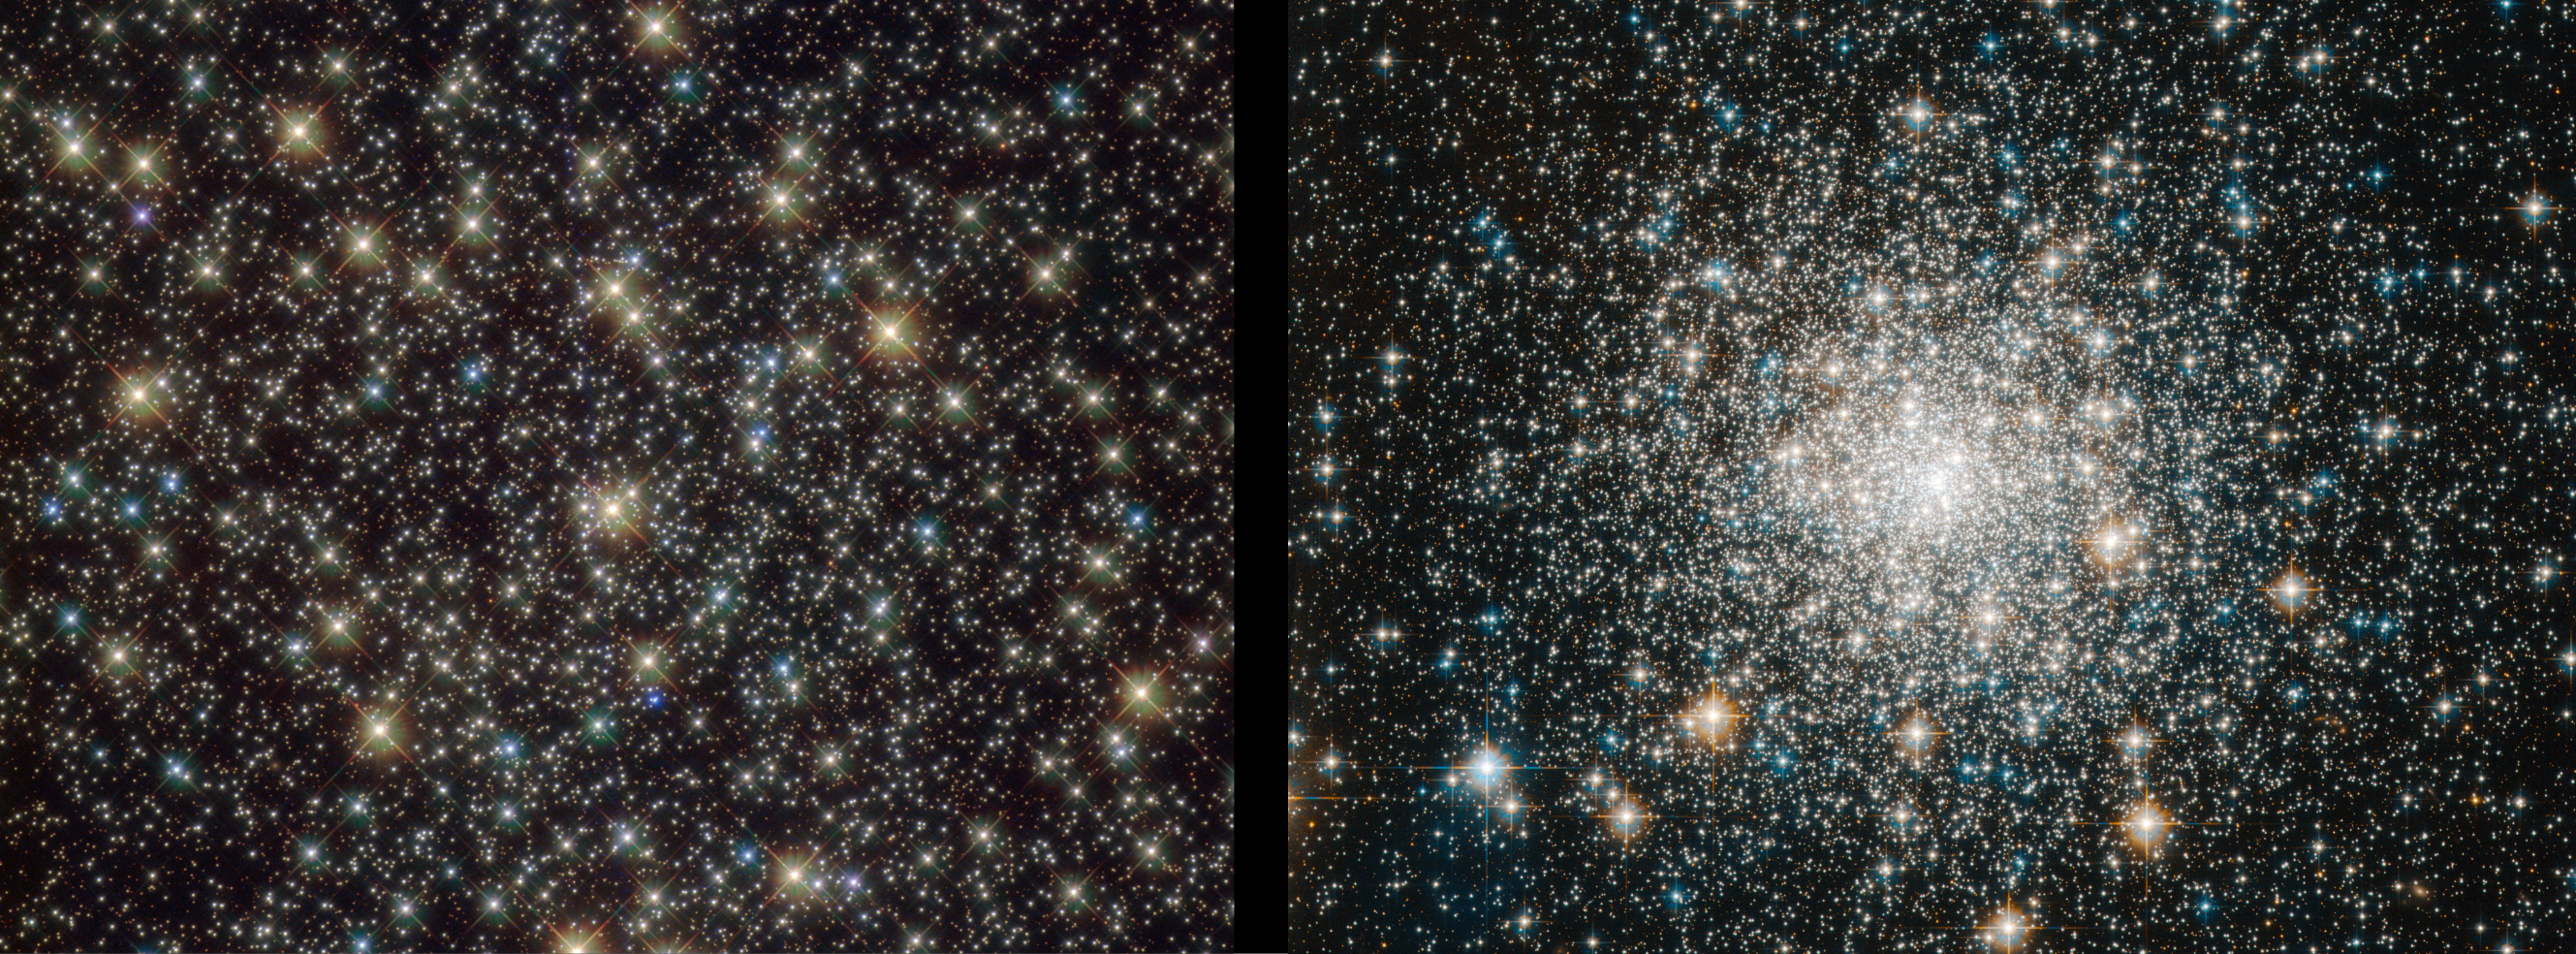

Globular cluster targets that revealed “forever young” stars

This image features two globular clusters from a recent Hubble study that provides some of the clearest evidence yet that blue stragglers owe their youthful appearance not to collisions, but to life in close stellar partnerships, and to the environments that allow those partnerships to survive.

The international research team analysed ultraviolet Hubble observations of 48 globular clusters in the Milky Way, assembling the largest and most complete catalogue of blue straggler stars ever produced. The sample includes more than 3,000 of these enigmatic objects observed in clusters spanning the entire range of stellar densities, allowing astronomers to search for long-suspected links between blue stragglers and their surroundings.

The above image features NGC 3201 (left), one of the looser clusters in the dataset, and Messier 70, which is the study’s densest cluster.

Credit: ESA/Hubble & NASA